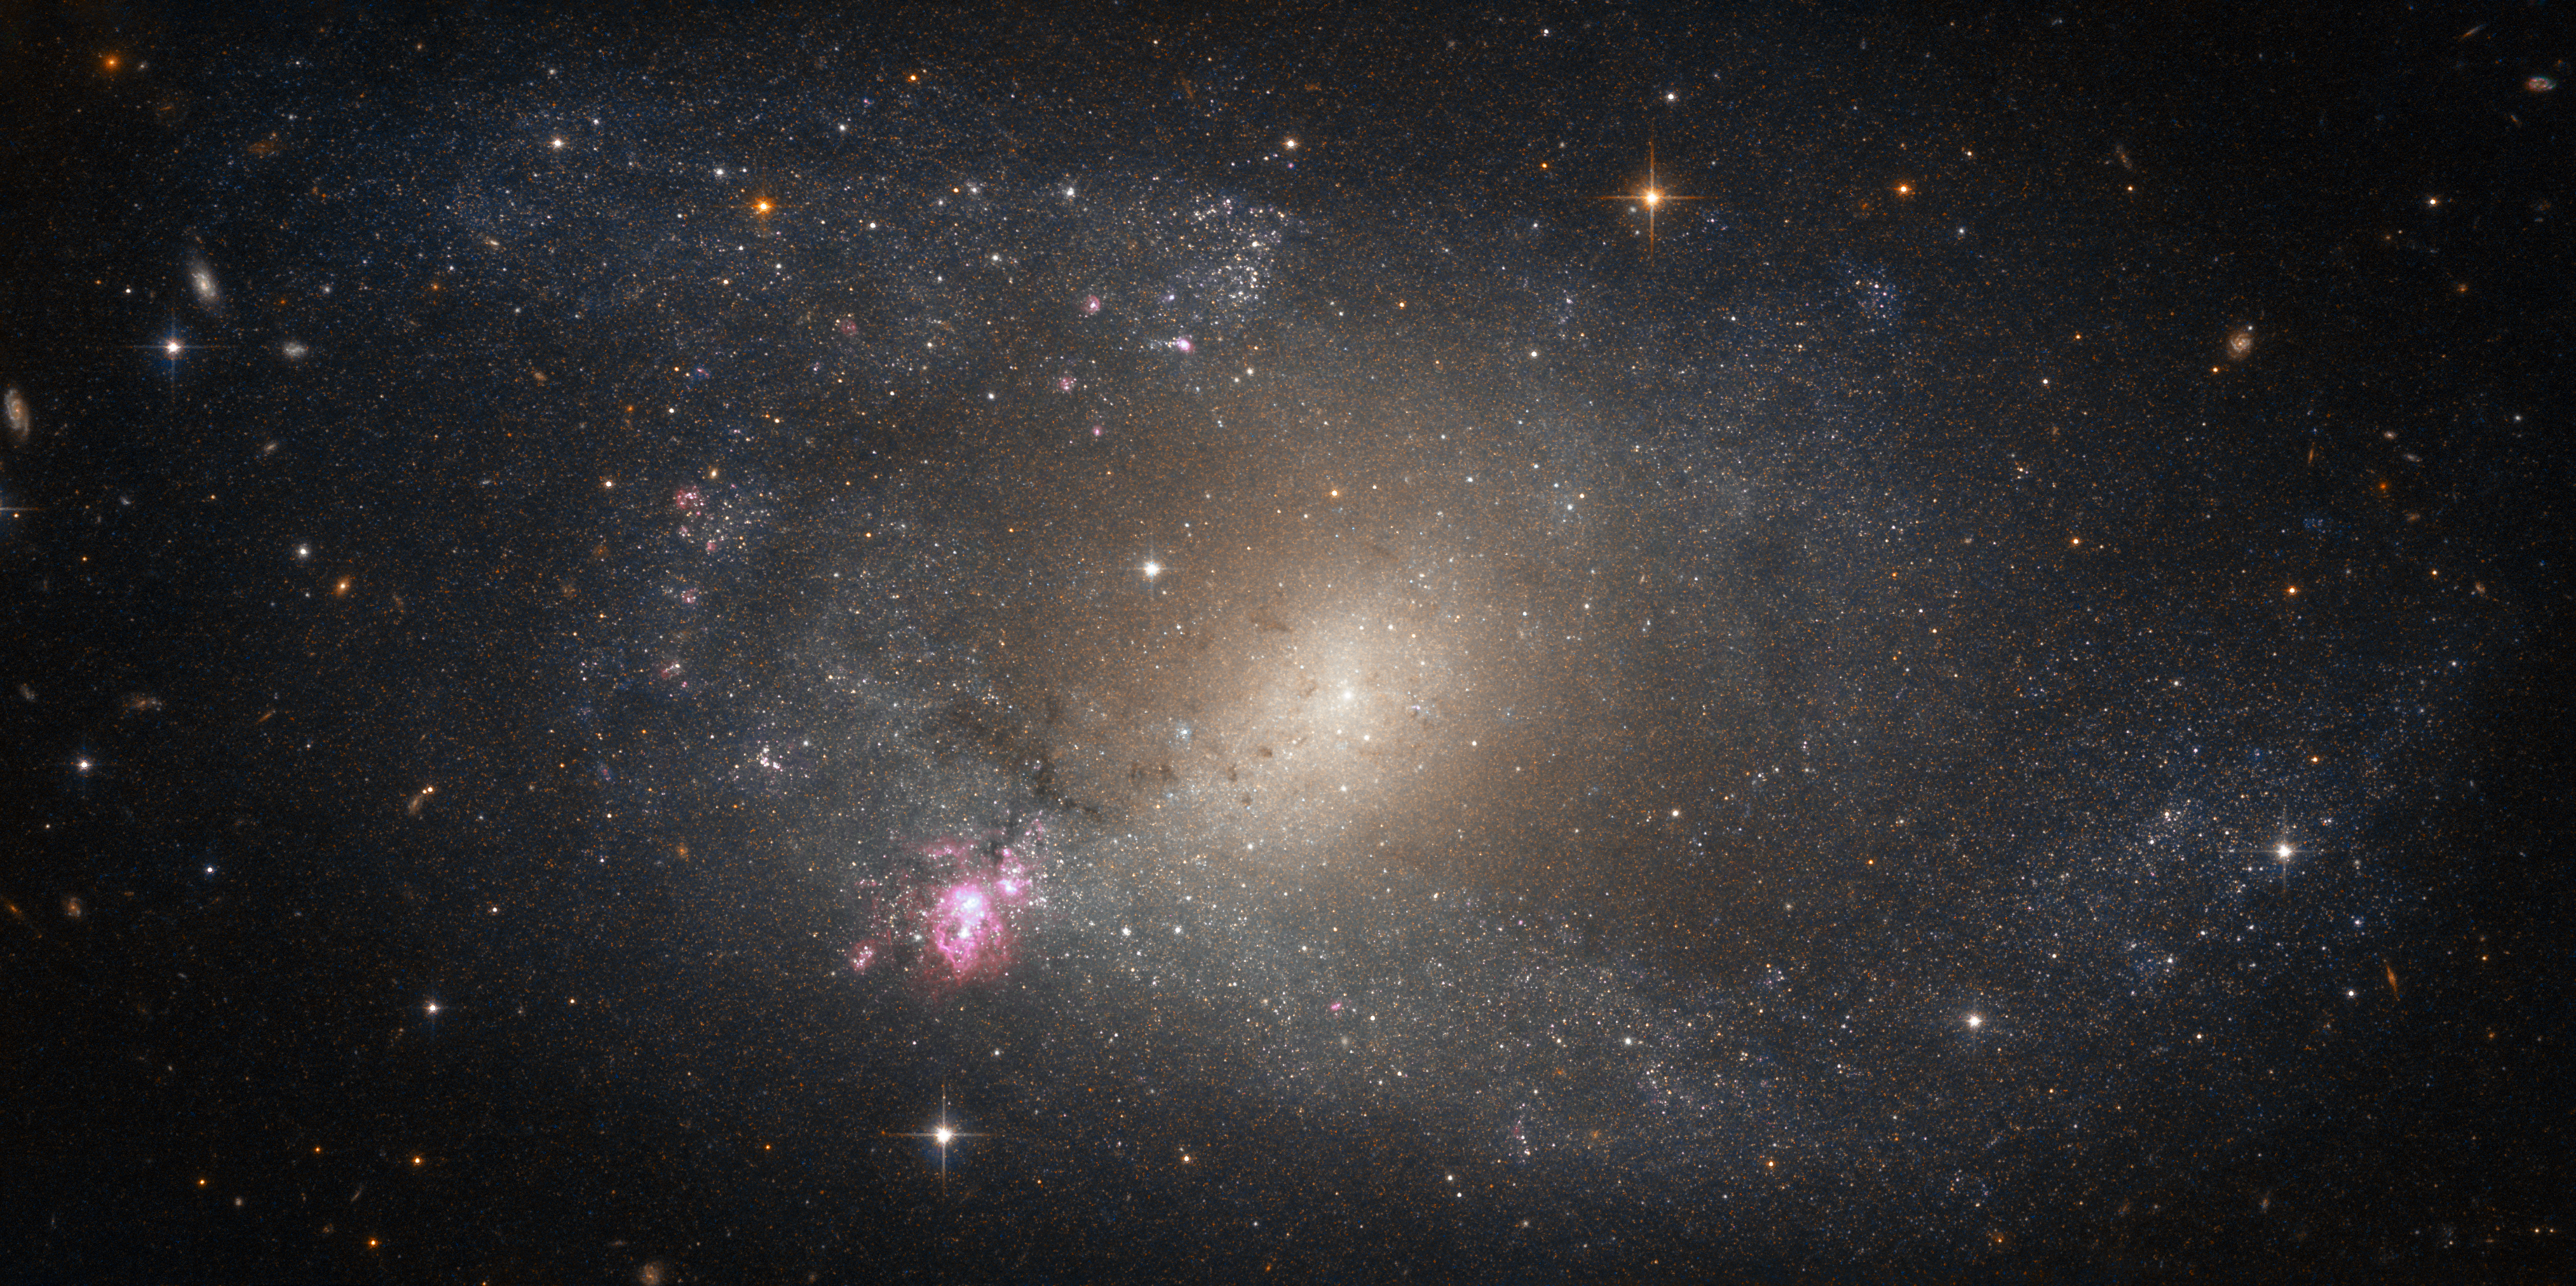

Starbursts in NGC 5398

This NASA/ESA Hubble Space Telescope picture shows NGC 5398, a barred spiral galaxy located about 55 million light-years away.

The galaxy is famous for containing an especially extensive HII region, a large cloud composed of ionised hydrogen (or HII, pronounced “H-two”, with H being the chemical symbol for hydrogen and the “II” indicating that the atoms have lost an electron to become ionised). NGC 5398’s cloud is named Tol 89 and sits at the lower left end of the galaxy’s central “bar” of stars, a structure that cuts through the galactic core and funnels material inwards to maintain the star formation occurring there.

Tol 89 is conspicuous in being the only large massive star forming complex in the entire galaxy, with an extension of roughly 5000 times 4000 light-years; it contains at least seven young and massive star clusters. The two brightest clumps within Tol 89, which astronomers have named simply “A” and “B”, appear to have undergone two bursts of star-forming activity — “starbursts” — roughly 4 million and less than 3 million years ago respectively. Tol 89-A is thought to contain a number of particularly bright and massive stars known as Wolf-Rayet stars, which are known for their high temperatures and extreme stellar winds.

Credit: ESA/Hubble & NASA